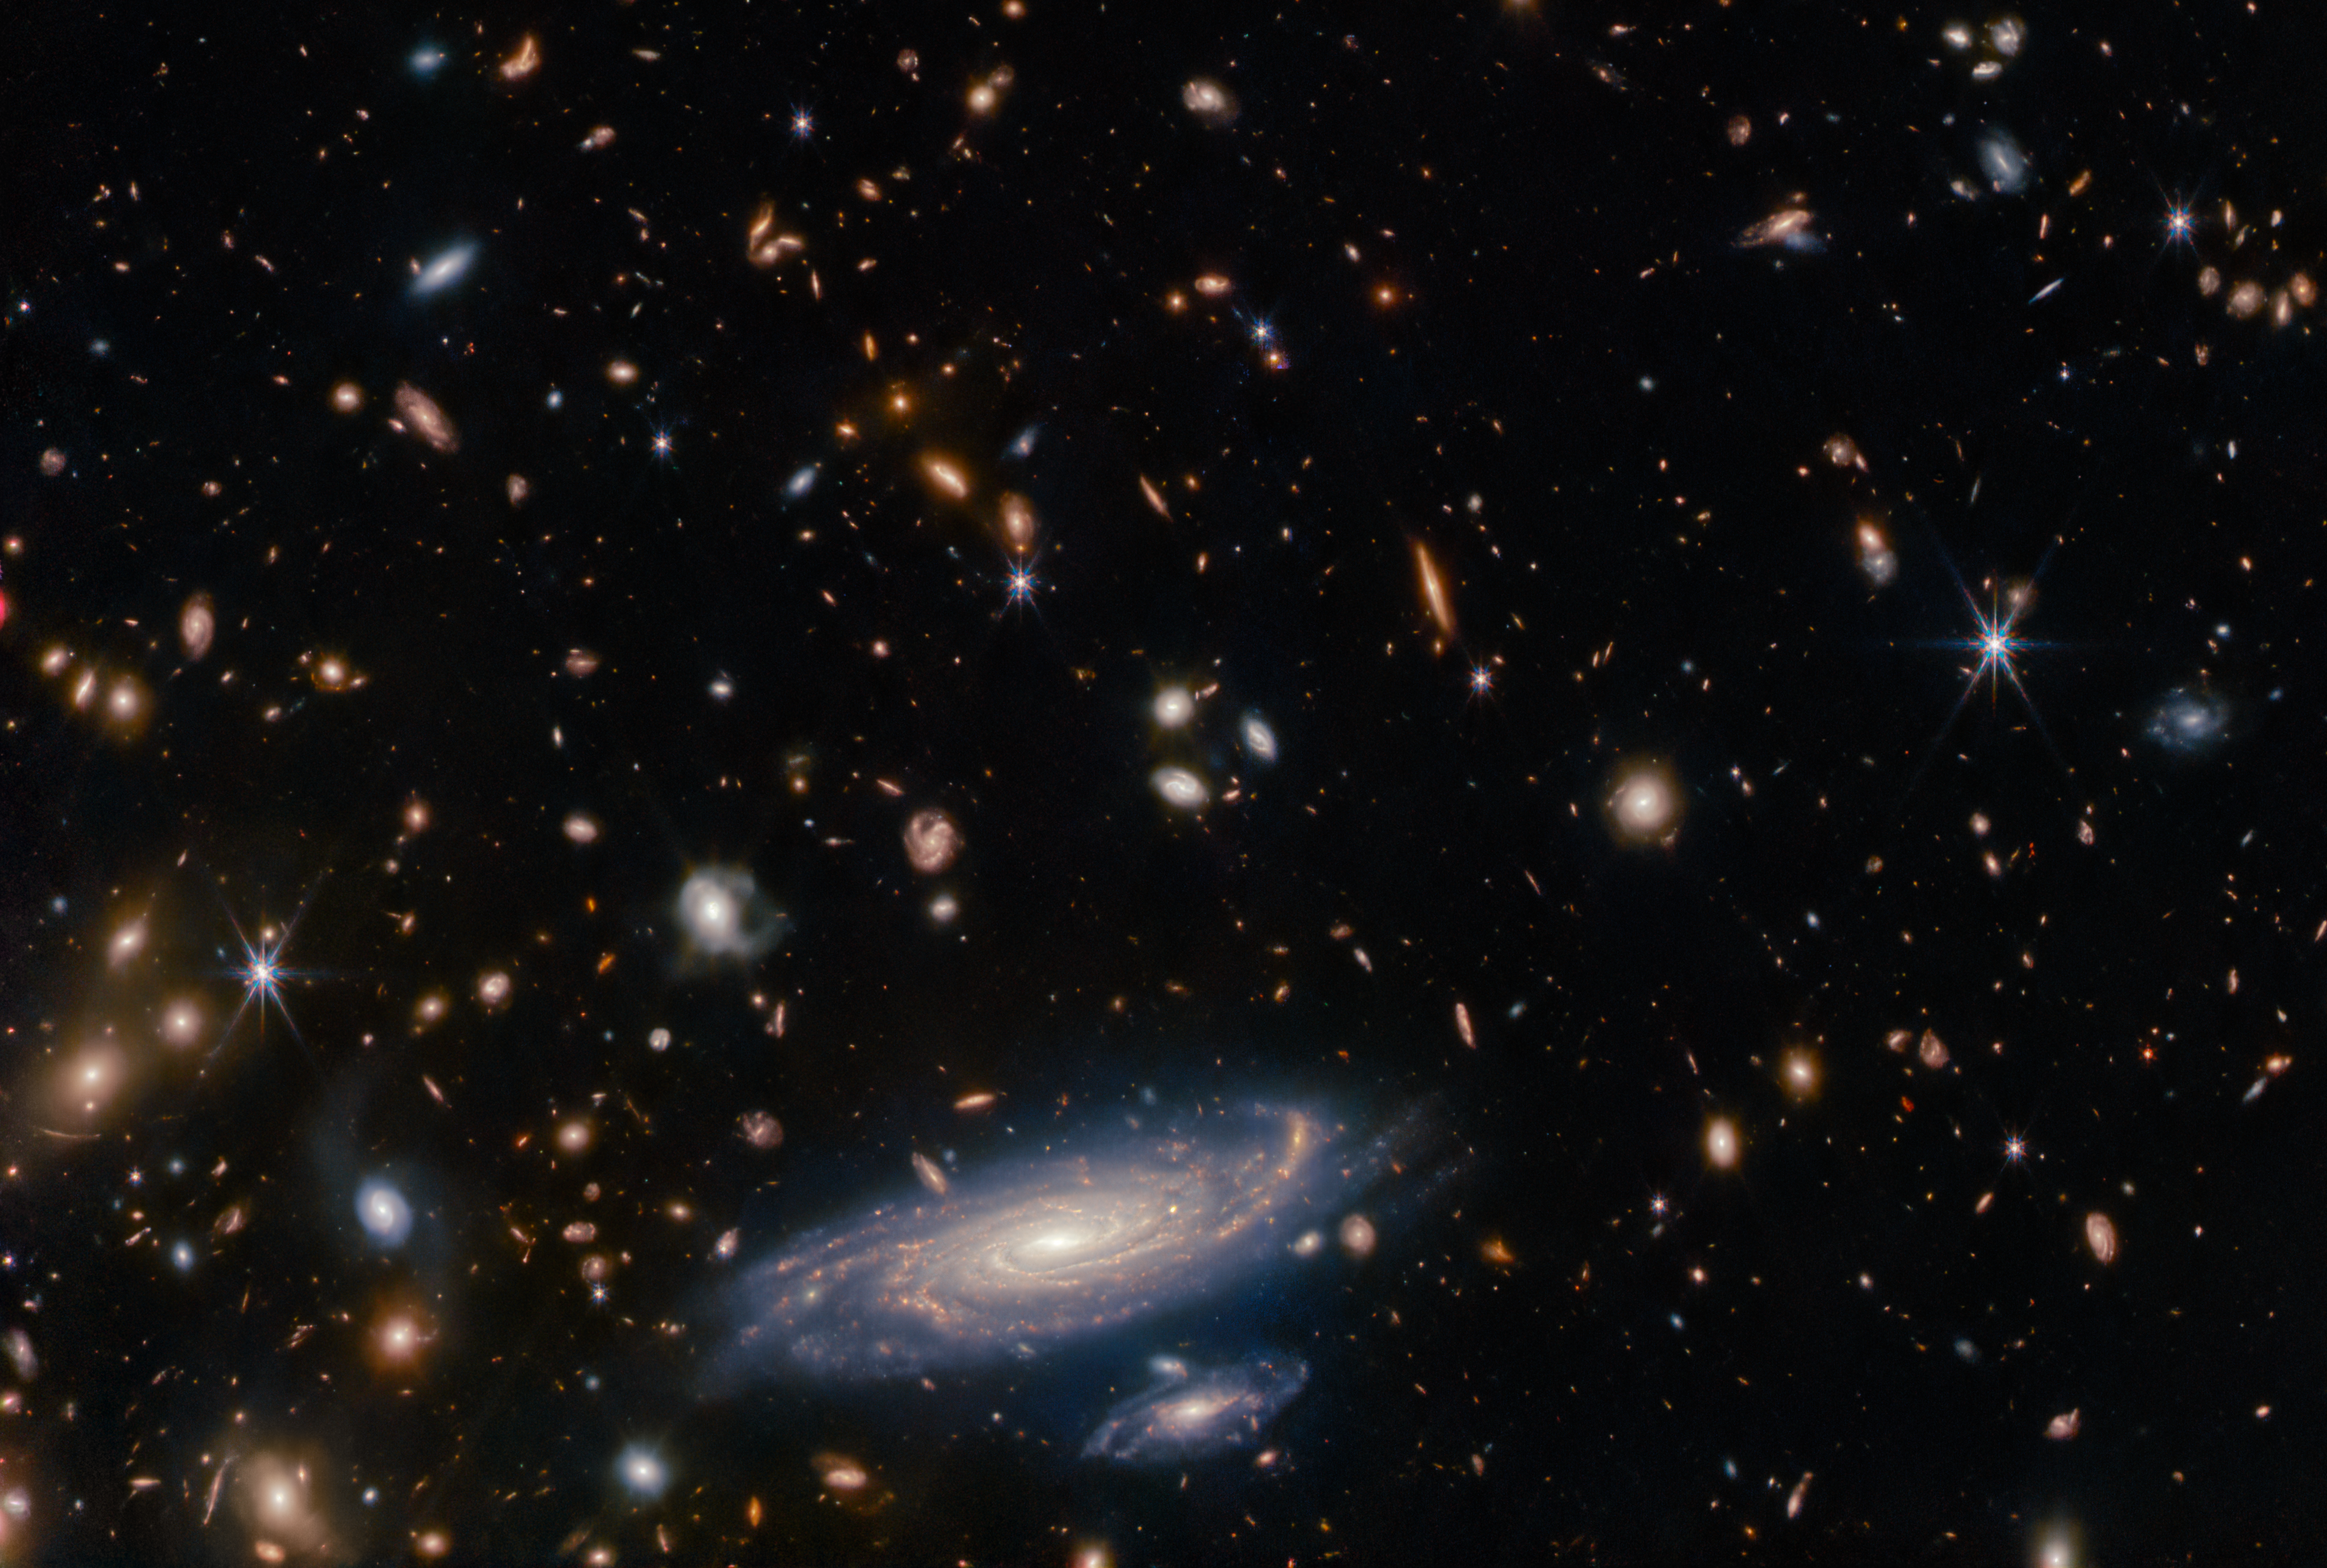

A Spiral Amongst Thousands

A crowded field of galaxies throngs this Picture of the Month from the NASA/ESA/CSA James Webb Space Telescope, along with bright stars crowned with Webb’s signature six-pointed diffraction spikes. The large spiral galaxy at the base of this image is accompanied by a profusion of smaller, more distant galaxies which range from fully-fledged spirals to mere bright smudges. Named LEDA 2046648, it is situated a little over a billion light-years from Earth, in the constellation Hercules.

One of Webb’s principal science goals is to observe distant galaxies in the early universe to understand the details of their formation, evolution, and composition. Webb’s keen infrared vision helps the telescope peer back in time, as the light from these distant galaxies is redshifted towards infrared wavelengths. Comparing these systems with galaxies in the local universe will help astronomers understand how galaxies grew to form the structure we see today. Webb will also probe the chemical composition of thousands of galaxies to shed light on how heavy elements were formed and built up as galaxies evolved.

To take full advantage of Webb’s potential for galaxy archeology, astronomers and engineers must first calibrate the telescope’s instruments and systems. Each of Webb’s instruments contains a labyrinthine array of mirrors and other optical elements that redirect and focus starlight gathered by Webb’s main mirror. This particular observation was part of the commissioning campaign for Webb’s Near-InfraRed Imager and Slitless Spectrograph (NIRISS). As well as performing science in its own right, NIRISS supports parallel observations with Webb’s Near-InfraRed Camera (NIRCam). NIRCam captured this galaxy-studded image while NIRISS was observing the white dwarf WD1657+343, a well-studied star. This allows astronomers to interpret and compare data from the two different instruments, and to characterise the performance of NIRISS.

Credit: ESA/Webb, NASA & CSA, A. Martel